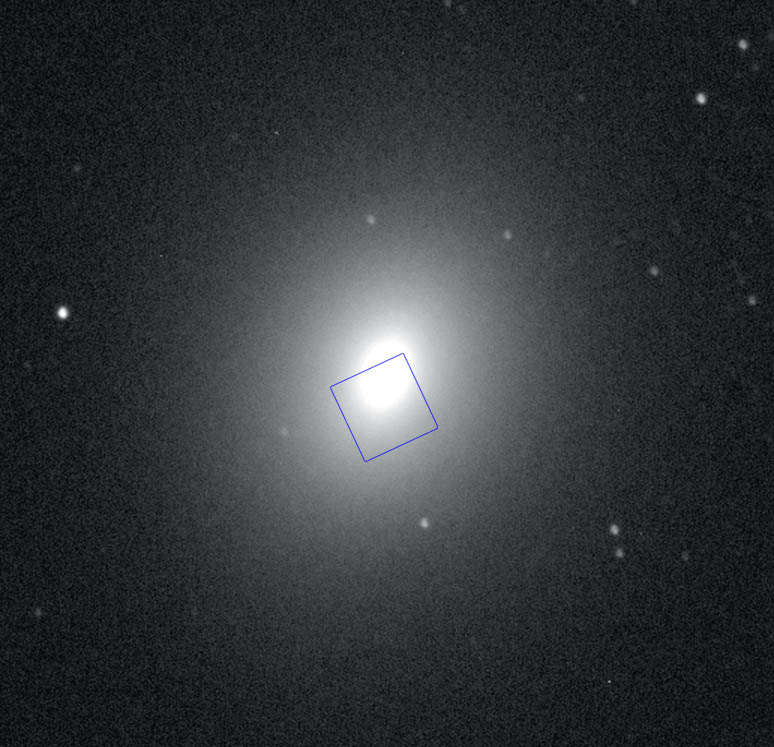

Ground-based image of M32 with the STIS field outlined.

Ground-based image of M32 with the STIS field outlined.

Credit: W. Keel (U. Alabama, Tuscaloosa)